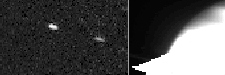

S/1995 S3

Astronomers have announced the discovery of at least two, and possibly as many as four, new moons orbiting the giant planet Saturn. This discovery was based upon Hubble telescope images that were taken when Saturn's rings were tilted edge-on to Earth.

Credit: NASA & ESA